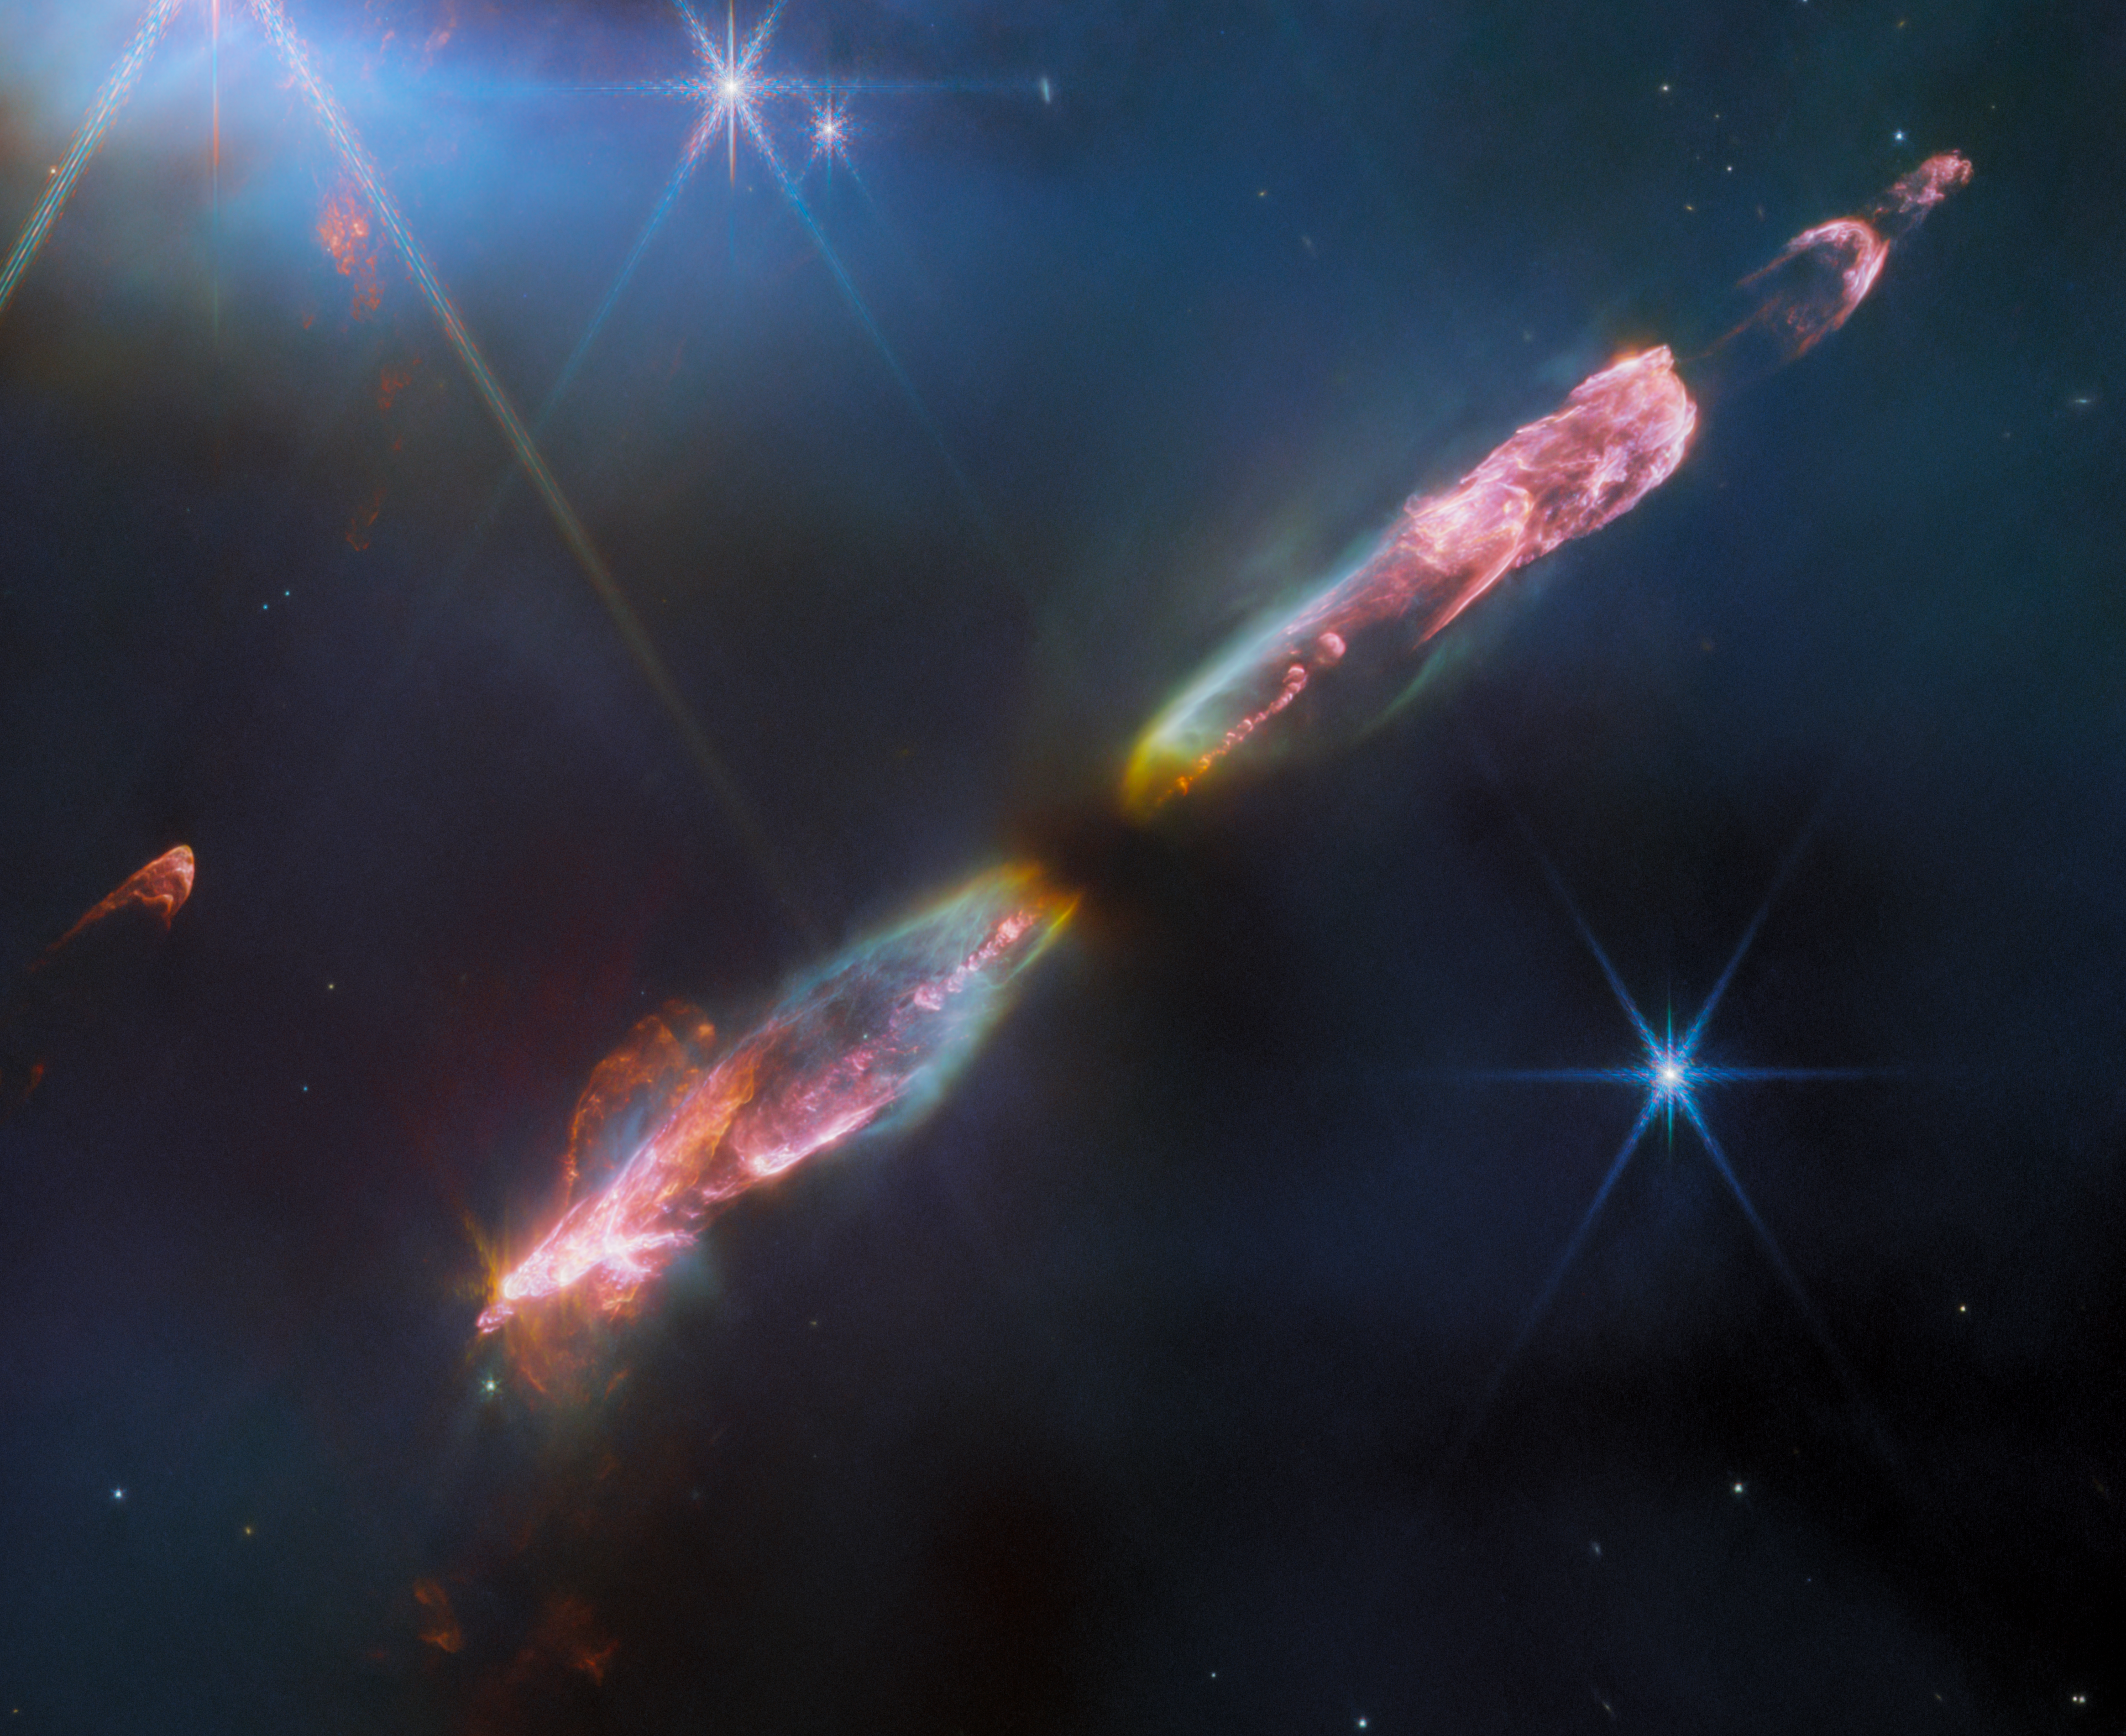

HH 211 (NIRCam image, cropped)

Featured in this image from the NASA/ESA/CSA James Webb Space Telescope is Herbig-Haro 211 (HH 211), a bipolar jet travelling through interstellar space at supersonic speeds. At roughly 1,000 light-years away from Earth in the constellation Perseus, the object is one of the youngest and nearest protostellar outflows, making it an ideal target for Webb.

Herbig-Haro objects are luminous regions surrounding newborn stars, and are formed when stellar winds or jets of gas spewing from these newborn stars form shockwaves colliding with nearby gas and dust at high speeds. This spectacular image of HH 211 reveals an outflow from a Class 0 protostar, an infantile analogue of our Sun when it was no more than a few tens of thousands of years old and with a mass only 8% of the present-day Sun (it will eventually grow into a star like the Sun).

Infrared imaging is powerful in studying newborn stars and their outflows, because such stars are invariably still embedded within the gas from the molecular cloud in which they formed. The infrared emission of the star’s outflows penetrates the obscuring gas and dust, making a Herbig-Haro object like HH 211 ideal for observation with Webb’s sensitive infrared instruments. Molecules excited by the turbulent conditions, including molecular hydrogen, carbon monoxide and silicon monoxide, emit infrared light that Webb can collect to map out the structure of the outflows.

The image showcases a series of bow shocks to the southeast (lower-left) and northwest (upper-right) as well as the narrow bipolar jet that powers them in unprecedented detail — roughly 5 to 10 times higher spatial resolution than any previous images of HH 211. The inner jet is seen to “wiggle” with mirror symmetry on either side of the central protostar. This is in agreement with observations on smaller scales and suggests that the protostar may in fact be an unresolved binary star.

Credit: ESA/Webb, NASA, CSA, T. Ray (Dublin Institute for Advanced Studies)